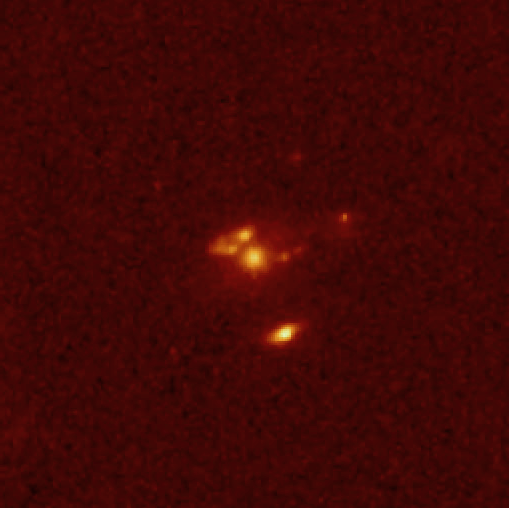

Remote Starburst Galaxy J1/J2 (2)

This NASA/ESA Hubble Space Telescope image was taken with the Wide Field and Planetary Camera 2 (WFPC2) in red light. The image shows a detailed view of the galaxy SMM J14011+0252, also called J1/J2, which was first observed with the SCUBA (Sub-millimetre Common User Bolometer Array) instrument on the James Clerk Maxwell Telescope in Hawaii. This galaxy belongs to an enigmatic 'hidden' population of galaxies in the early Universe. A group of European and American astronomers led by Jean-Paul Kneib has used Hubble and the gravitational amplification of the galaxy cluster to make the first observation of one of these distant massively star-forming 'dusty' galaxies revealed in the process of formation. The two components of the galaxy, J1 (centered) and J2 (below), are only separated by 50, 000 light years, but have quite different structure. J1 is redder and shows complex structure - very different than optically selected galaxies seen at the same epoch. J2 is bluer and is very compact. Most of the dust emission detected with SCUBA is likely to come from J1. The finest details in J1 are less than 1, 000 light years large - when corrected for the distortions due to the gravitational lens.

For further information, please click the news release link.

Credit: ESA & Jean-Paul Kneib (Observatoire Midi-Pyrénées)